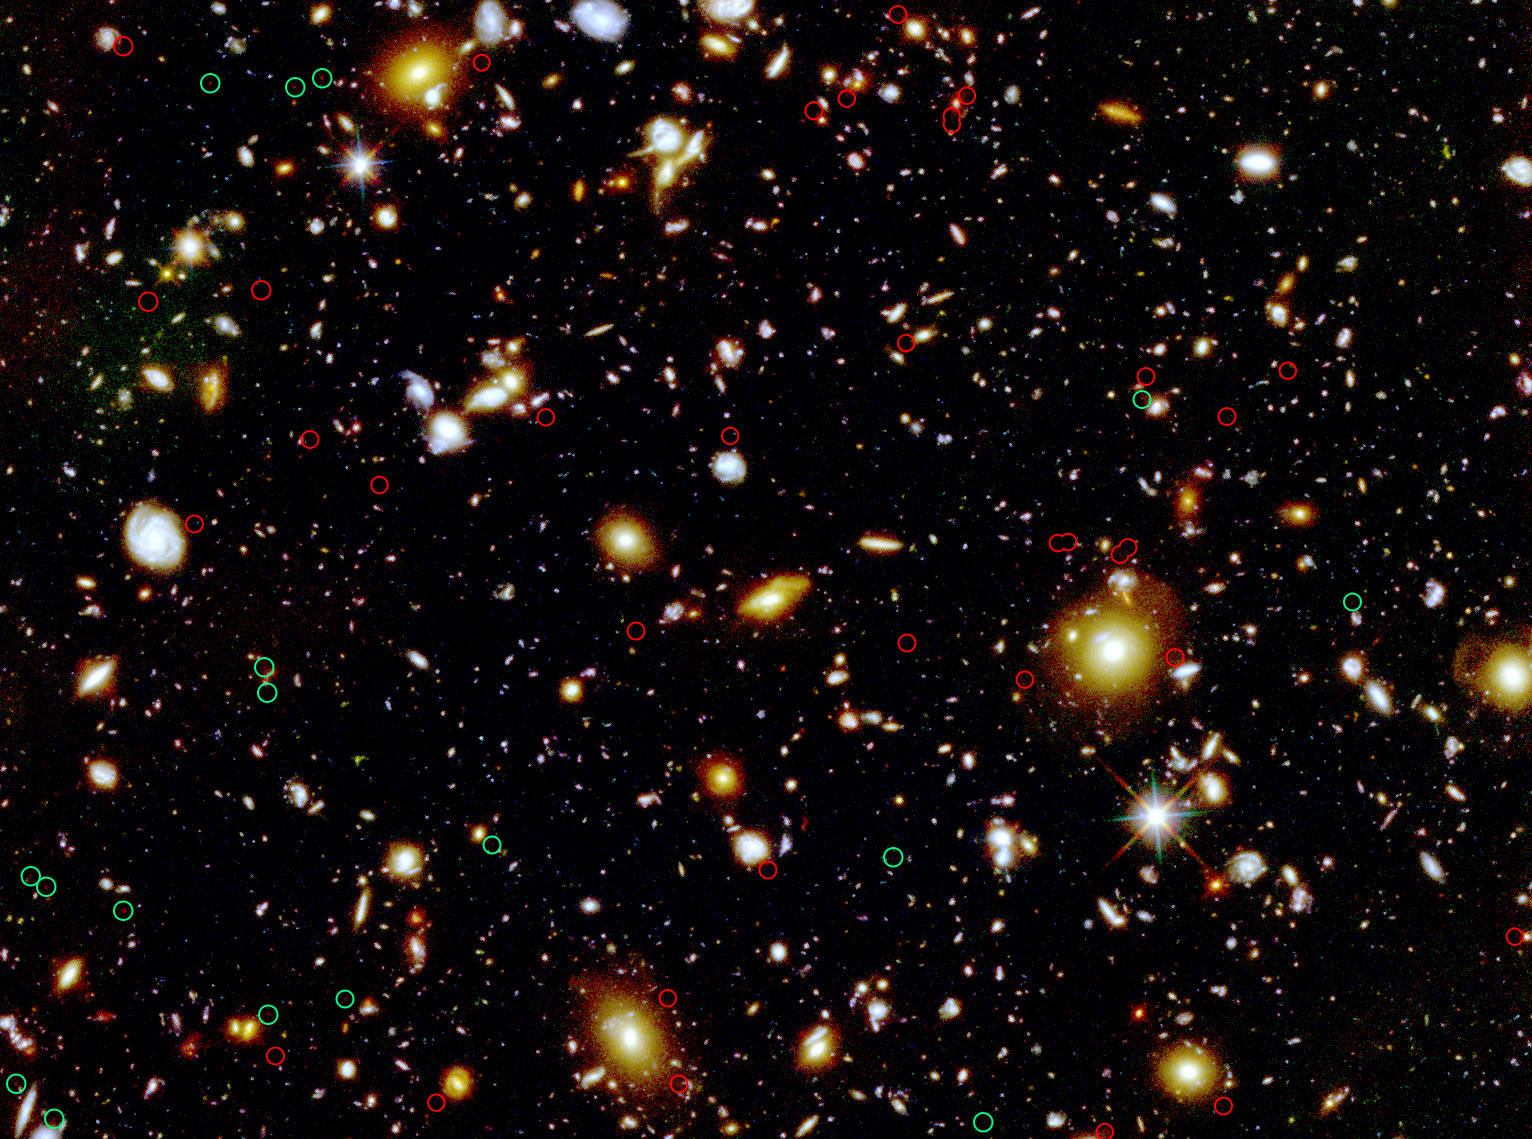

Gravitationally lensed high-redshift galaxy candidates

This is a colour composite image of the Hubble Ultra Deep Field. Green circles mark the locations of candidate galaxies at a redshift of z~8, while higher-redshift candidates are circled in red. The estimated distances to these candidates have not been confirmed spectroscopically.

About 20 to 30 percent of these high-z galaxy candidates are very close to foreground galaxies, which is consistent with the prediction that a significant fraction of galaxies at very high redshifts are gravitationally lensed by individual foreground galaxies. This will help as a guide for future observations planned for the James Webb Space Telescope when it is launched.

Credit: NASA, ESA, S. Wyithe (University of Melbourne, Australia), H. Yan (Ohio State University, USA), R. Windhorst (Arizona State University, USA), and S. Mao (Jodrell Bank Centre for Astrophysics and National Astronomical Observatories of China)
Acknowledgment: G. Illingworth and R. Bouwens (University of California, Santa Cruz, USA) and the HUDF09 Team